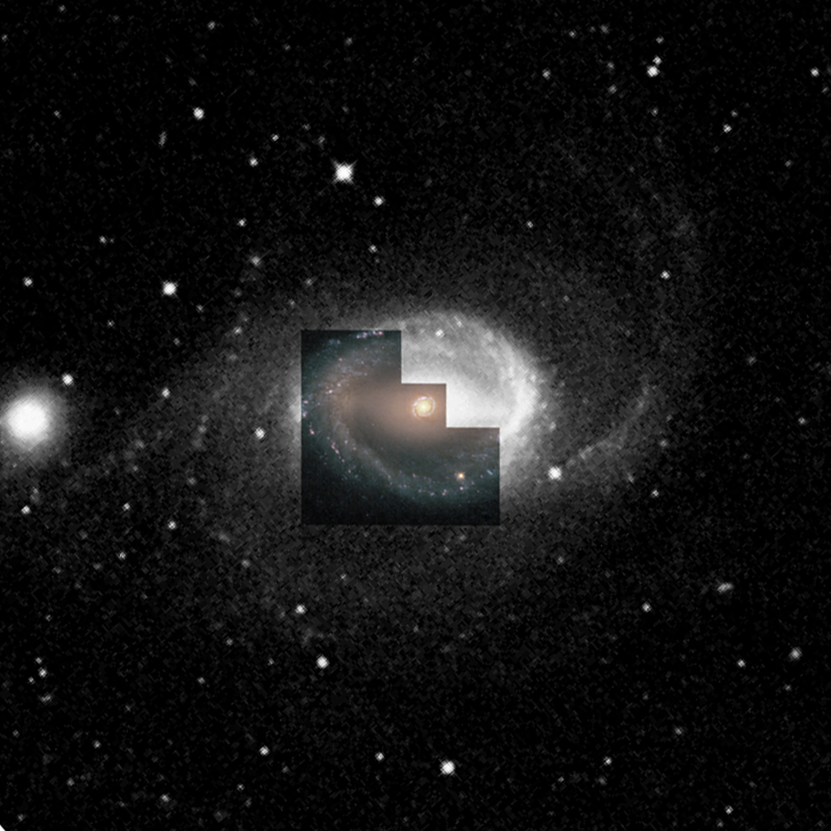

Ground-based view of NGC 1512 (WFPC2 overlay)

This ground-based image is 0.15 degrees wide and shows where Hubble pointed its cameras. The horizontal bar in this spiral galaxy is visible and so is an outer ring of star formation.

This image is issued jointly by NASA and ESA.

Credit: NASA, ESA, Dan Maoz (Tel-Aviv University, Israel, and Columbia University, USA)